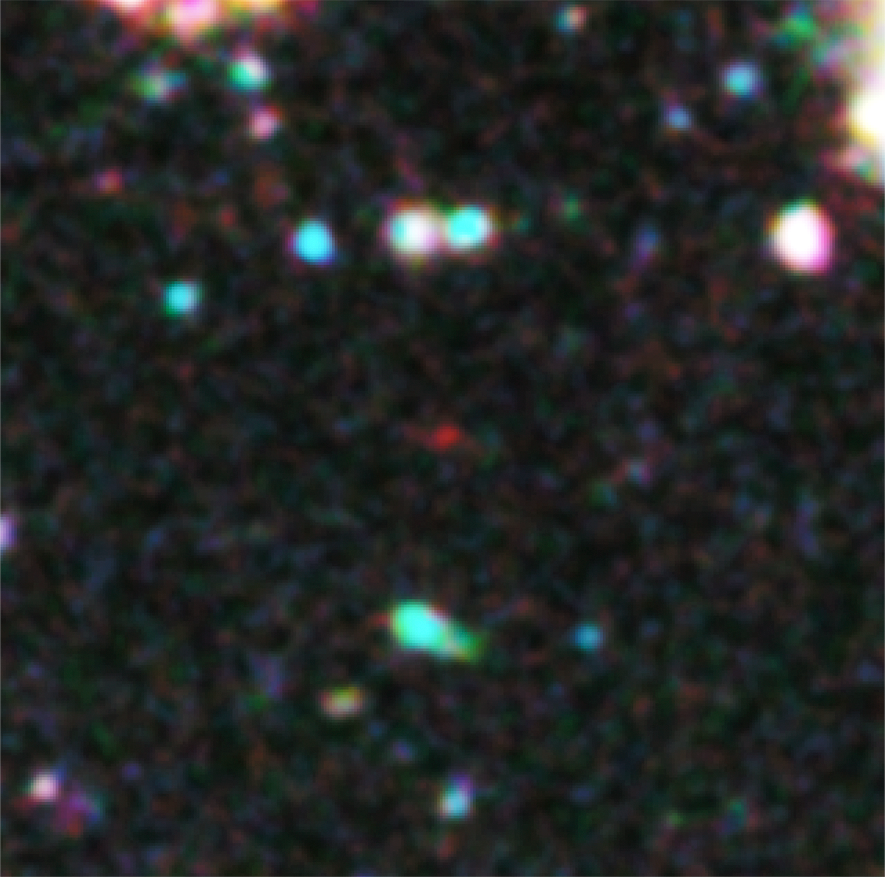

Hubble finds a new contender for galaxy distance record

Astronomers have used Hubble to spot what they think is the furthest and one of the very earliest galaxies ever seen in the Universe. Candidate galaxy UDFj-39546284 appears as a faint red blob in this part of an ultra deep field exposure taken with the NASA/ESA Hubble Space Telescope. This is the deepest infrared image taken of the Universe. Based on the object’s colour, astronomers believe that its light has taken 13.2 billion years to reach us. Spectroscopic confirmation that this is indeed the most distant galaxy ever seen is expected to come from the NASA/ESA/CSA James Webb Space Telescope, which is planned for launch later this decade.

Credit: NASA, ESA, G. Illingworth (University of California, Santa Cruz), R. Bouwens (University of California, Santa Cruz, and Leiden University) and the HUDF09 Team